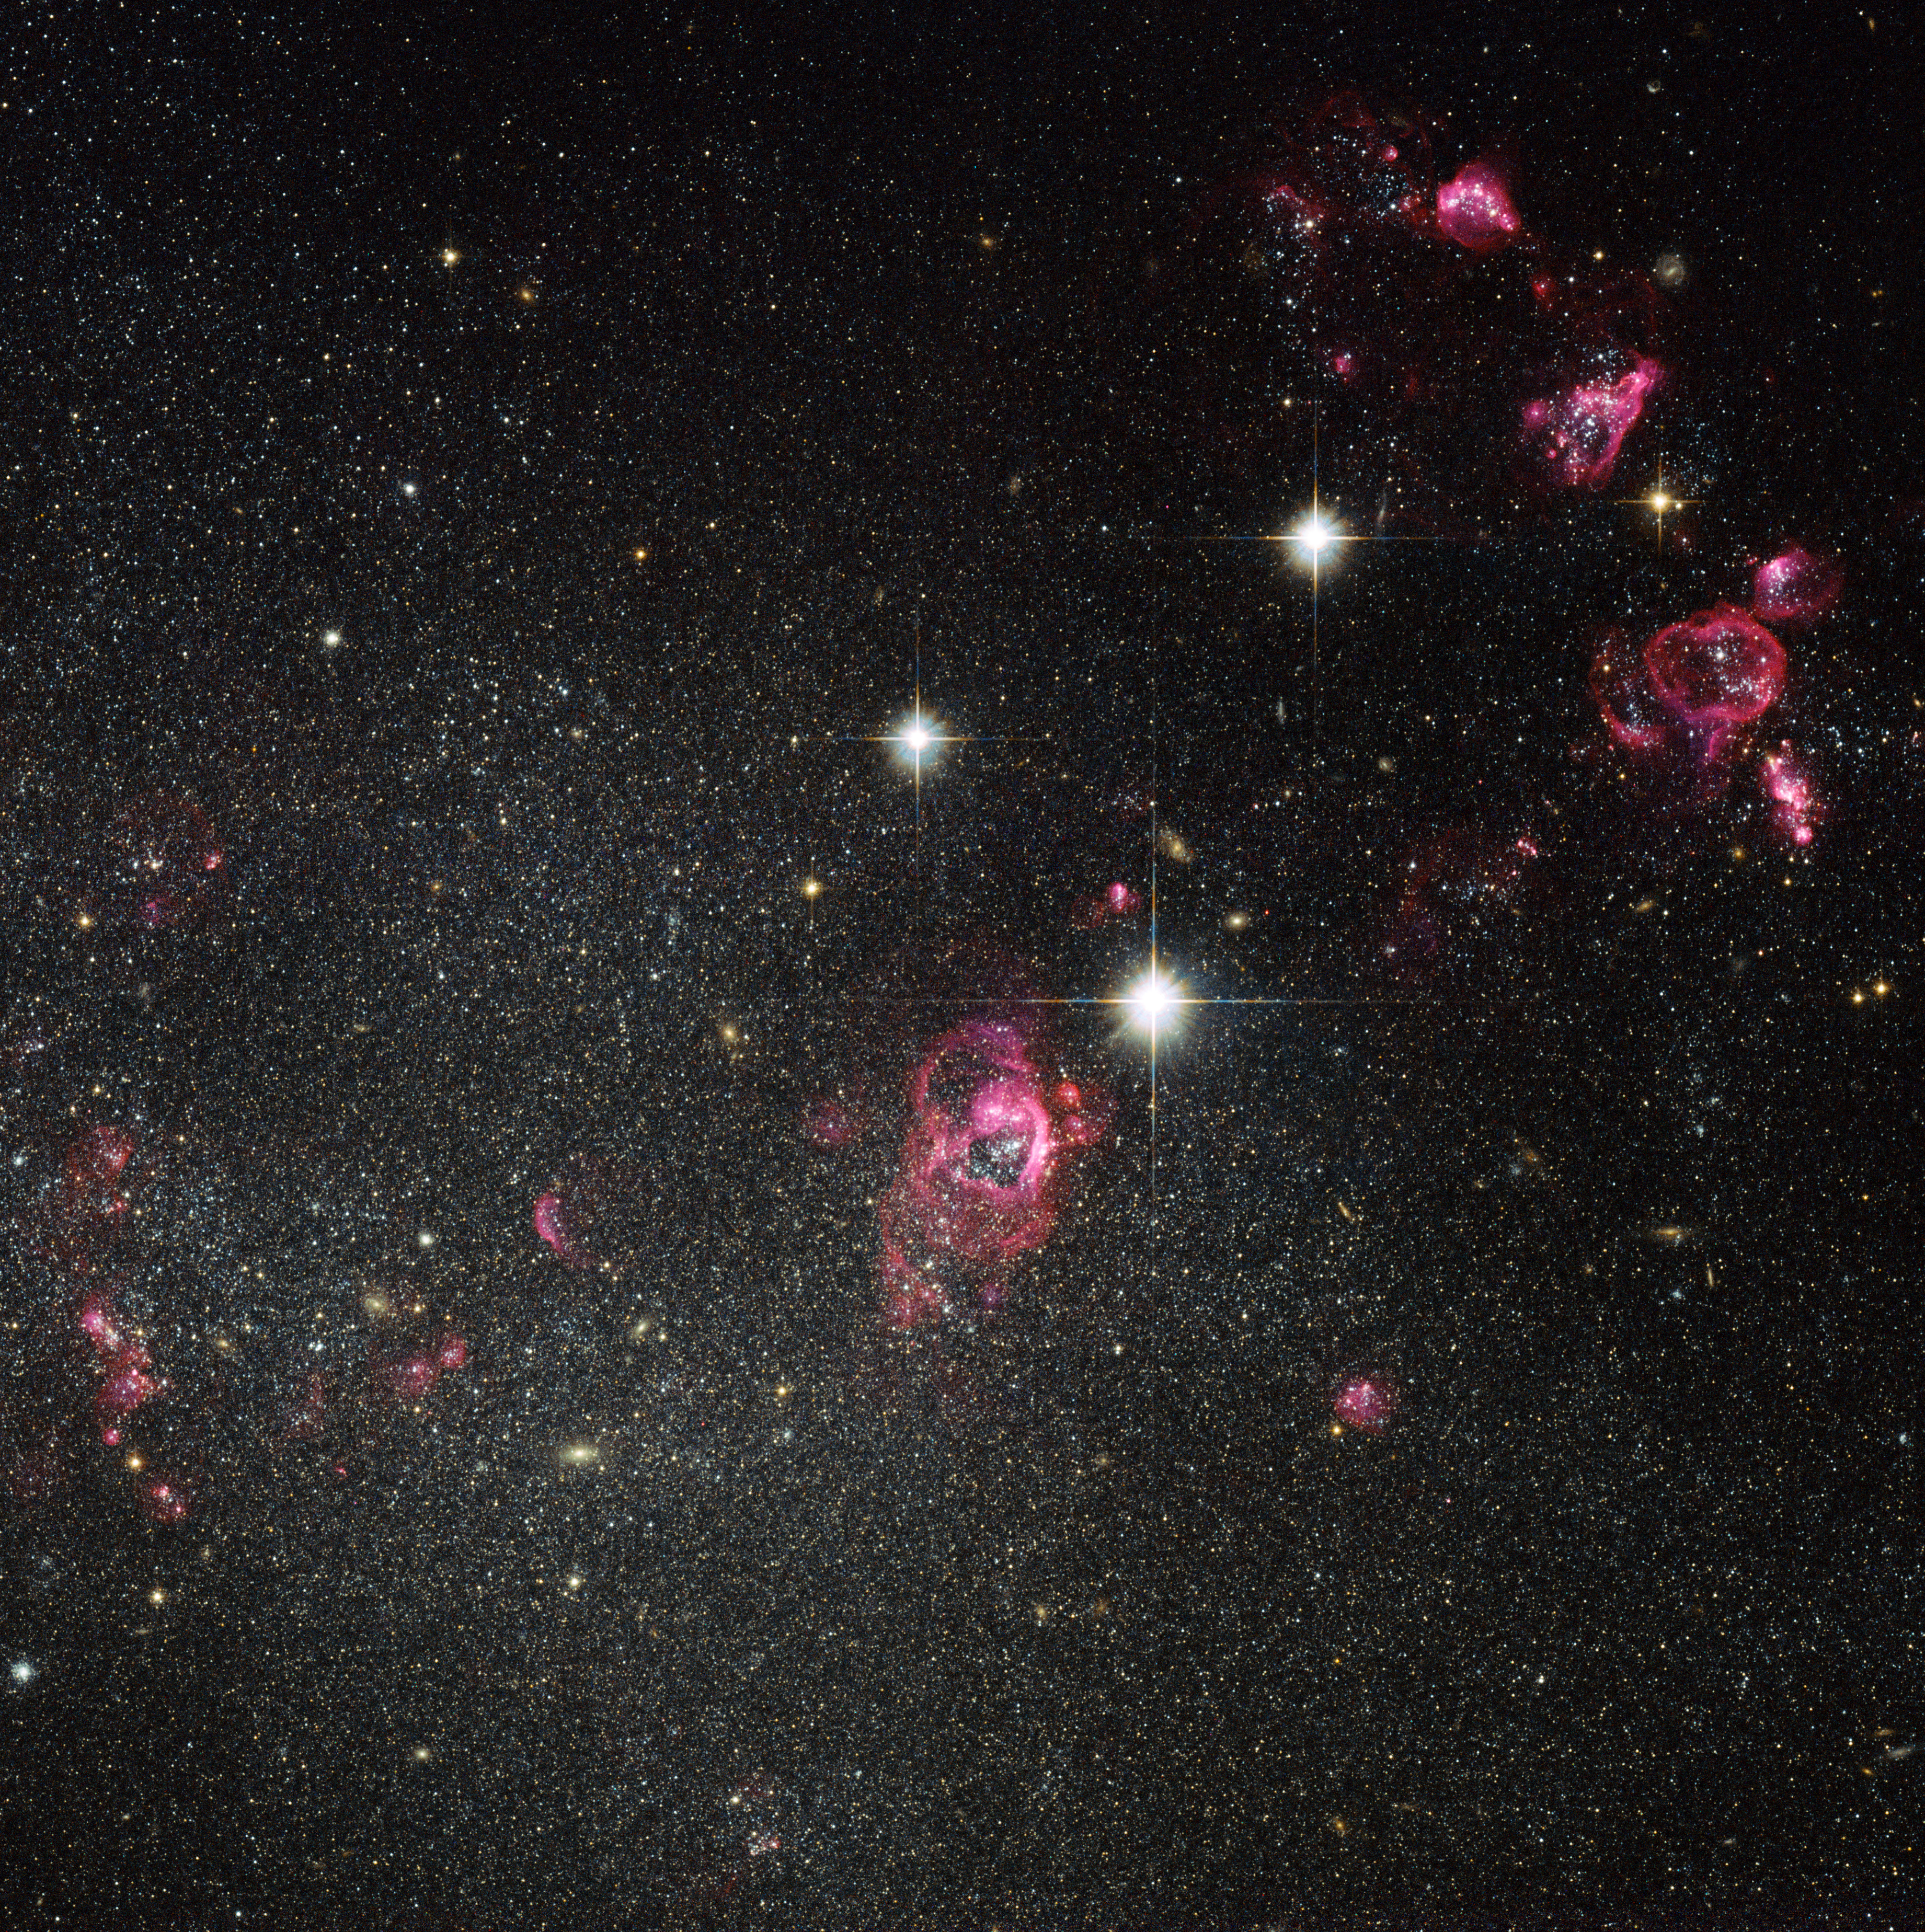

Hubble image of irregular galaxy Holmberg II

The NASA/ESA Hubble Space Telescope has captured this image of dwarf irregular galaxy Holmberg II. The galaxy is dominated by huge bubbles of glowing gas, which are sites of ongoing star formation.

As high-mass stars form in dense regions of gas and dust they expel strong stellar winds that blow away the surrounding material. The cavities are also blown clear of gas by the shock waves produced in supernovae, the violent explosions that mark the end of the lives of massive stars.

Credit: NASA & ESA